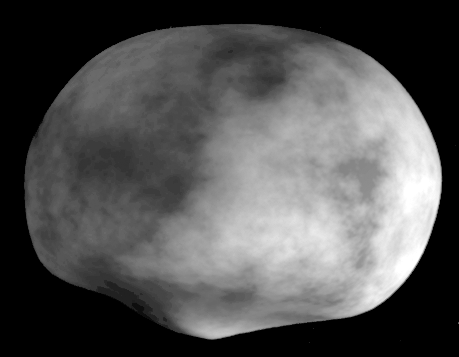

Crater on Asteroid Vesta

A 3-D computer model of the asteroid Vesta synthesized from Hubble topographic data. The crater's 8-mile high central peak can clearly be seen near the pole. The surface texture on the model is artificial, and is not representative of the true brightness variations on the asteroid.

Elevation features have not been exaggerated.

Credit: Ben Zellner (Georgia Southern University), Peter Thomas (Cornell University), NASA/ESA